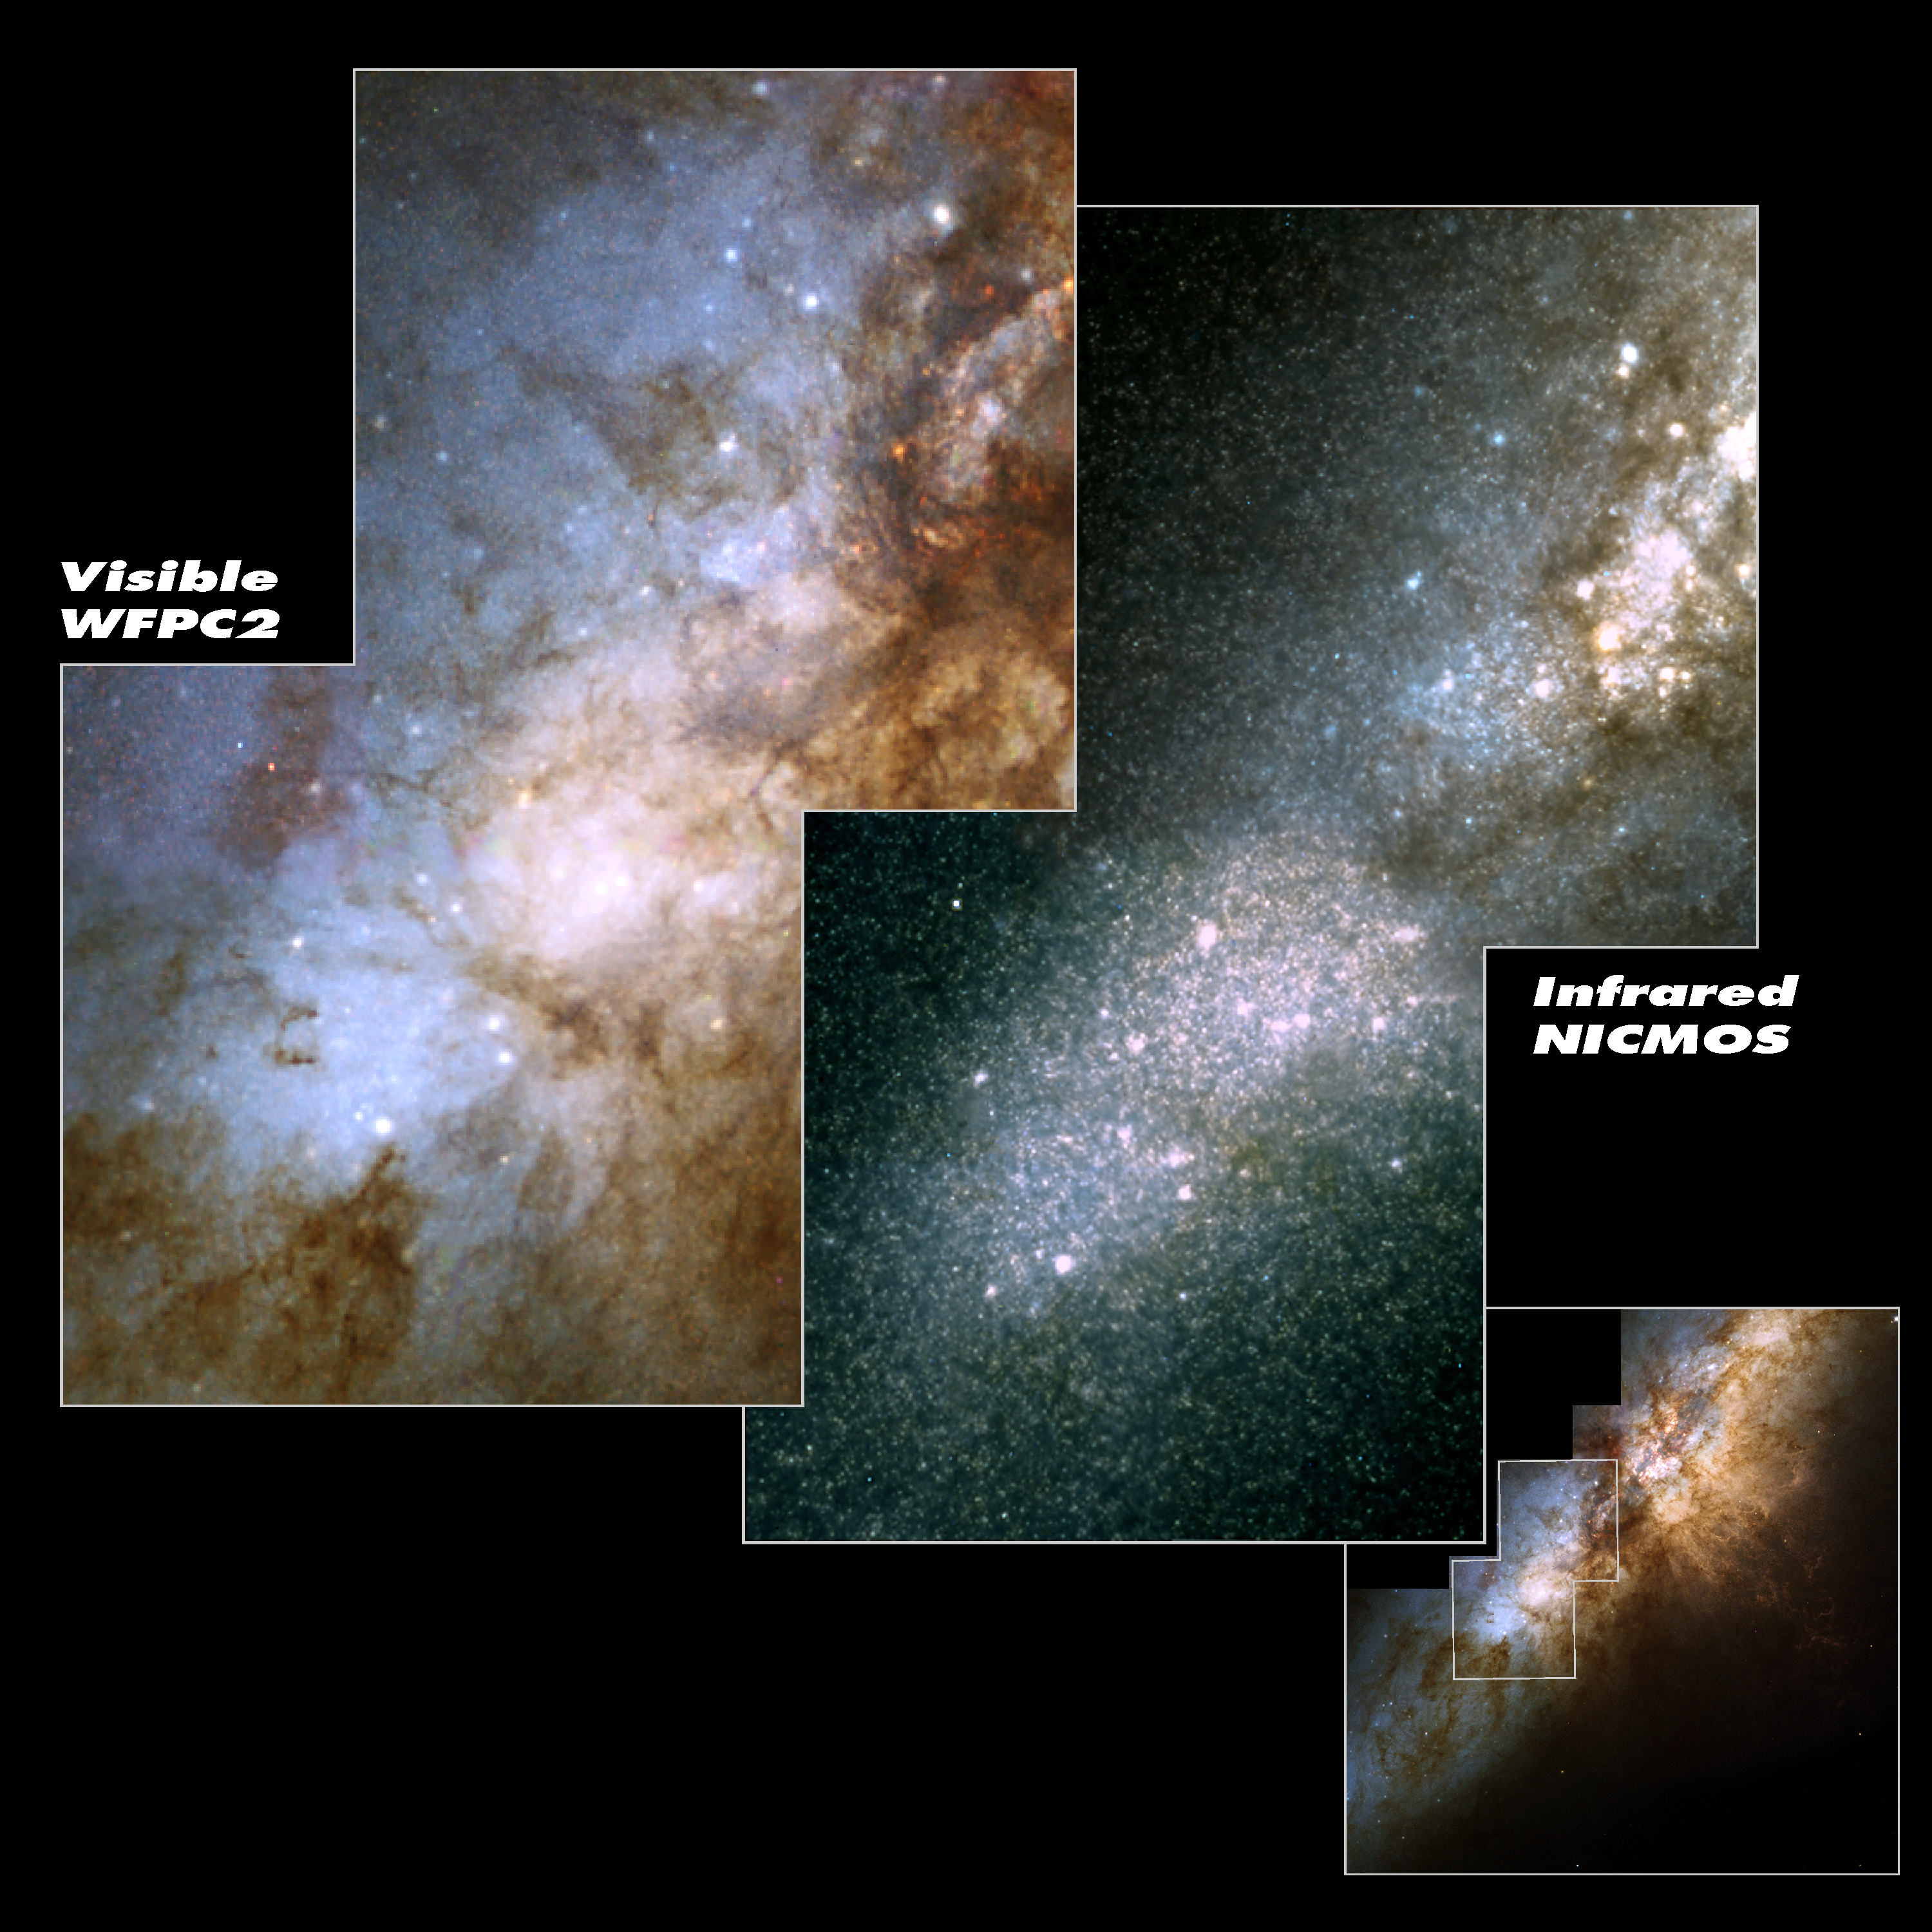

Hubble spies huge clusters of stars formed by ancient encounter

These two views of the heart of the galaxy M82 were snapped by the NASA/ESA Hubble Space Telescope. The image on the left was taken in visible light with the Wide Field and Planetary Camera 2 (WFPC2); the picture on the right, in infrared light. In the infrared view, the telescope's Near Infrared Camera and Multi-Object Spectrometer (NICMOS) peered through thick dust lanes to find some of the galaxy's more than 100 super star clusters. The clusters are the larger white dots scattered throughout the picture. They were formed during a violent encounter with the galaxy M81 about 600 million years ago. The thousands of stars in the galactic background belong to a population of red giant stars in M82. In the lower right corner the full WFPC2 image is shown. The white outline indicates the field of the NICMOS image. The galaxy is 12 million light-years from Earth in the constellation Ursa Major. The NICMOS and WFPC2 pictures were taken on September 15, 1997. Two images each composed of eight exposures were combined for the NICMOS mosaic: 768 seconds in J (1.1 micron - here coloured blue) and 768 seconds in H (1.6 micron - here coloured red) in total. Green is constructed from a mix of J and H. This image is issued jointly by NASA and ESA.

Credit: NASA, ESA, R. de Grijs (Institute of Astronomy, Cambridge, UK)